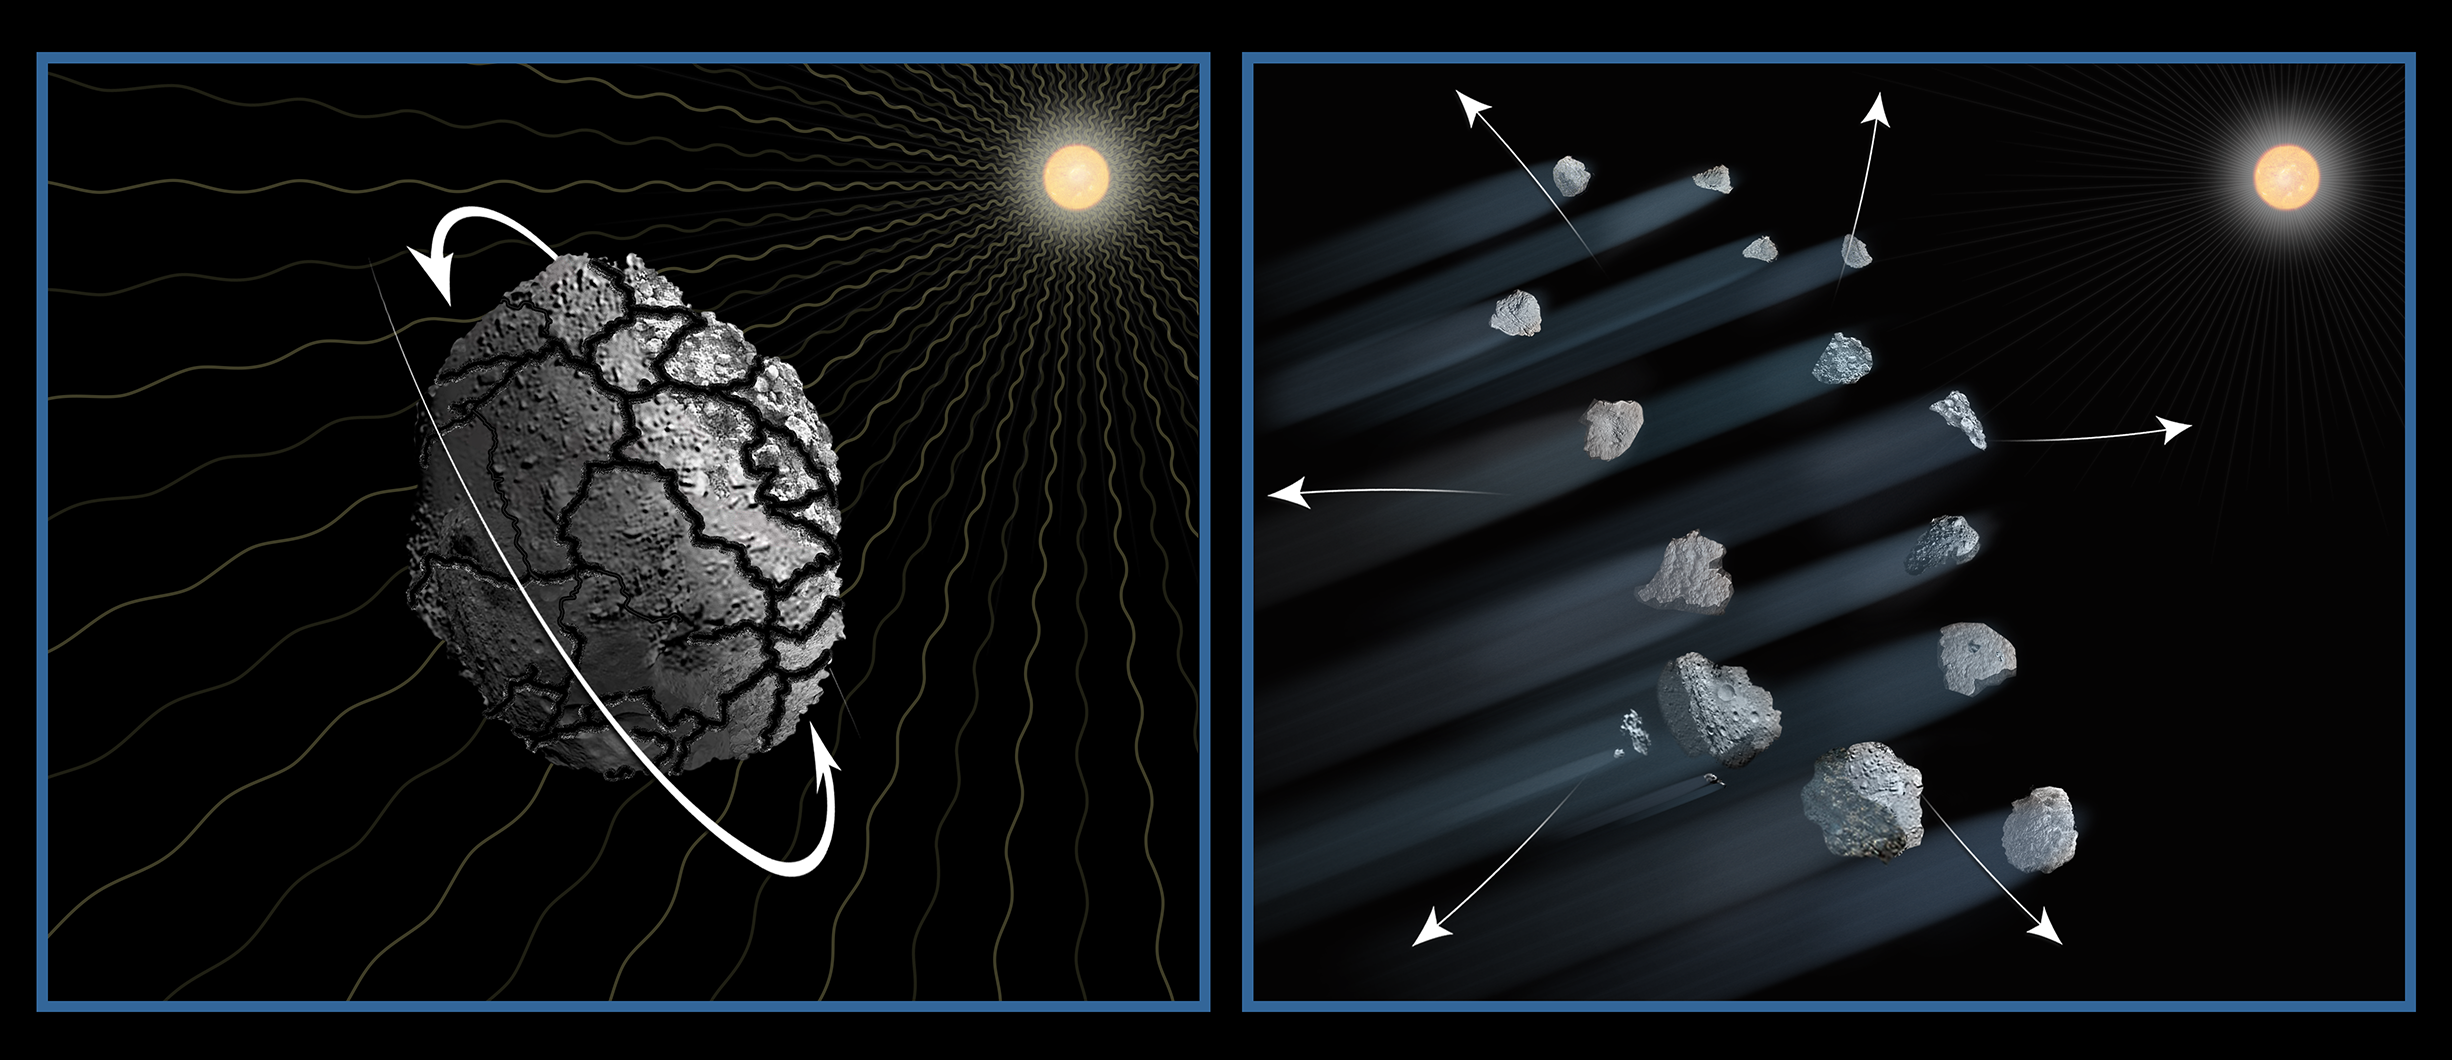

Artist's illustration of disintegrating asteroid P/2013 R3

This illustration shows one possible explanation for the disintegration of asteroid P/2013 R3.

It is likely that over the past 4.5 billion years the asteroid was fractured by collisions with other asteroids. The effects of sunlight will have caused the asteroid to slowly increase its rotation rate until the loosely bound fragments drifted apart due to centrifugal forces. Dust drifting off the pieces makes the comet-looking tails. This process may be common for small bodies in the asteroid belt.

Credit: NASA, ESA, D. Jewitt (UCLA), and A. Feild (STScI)